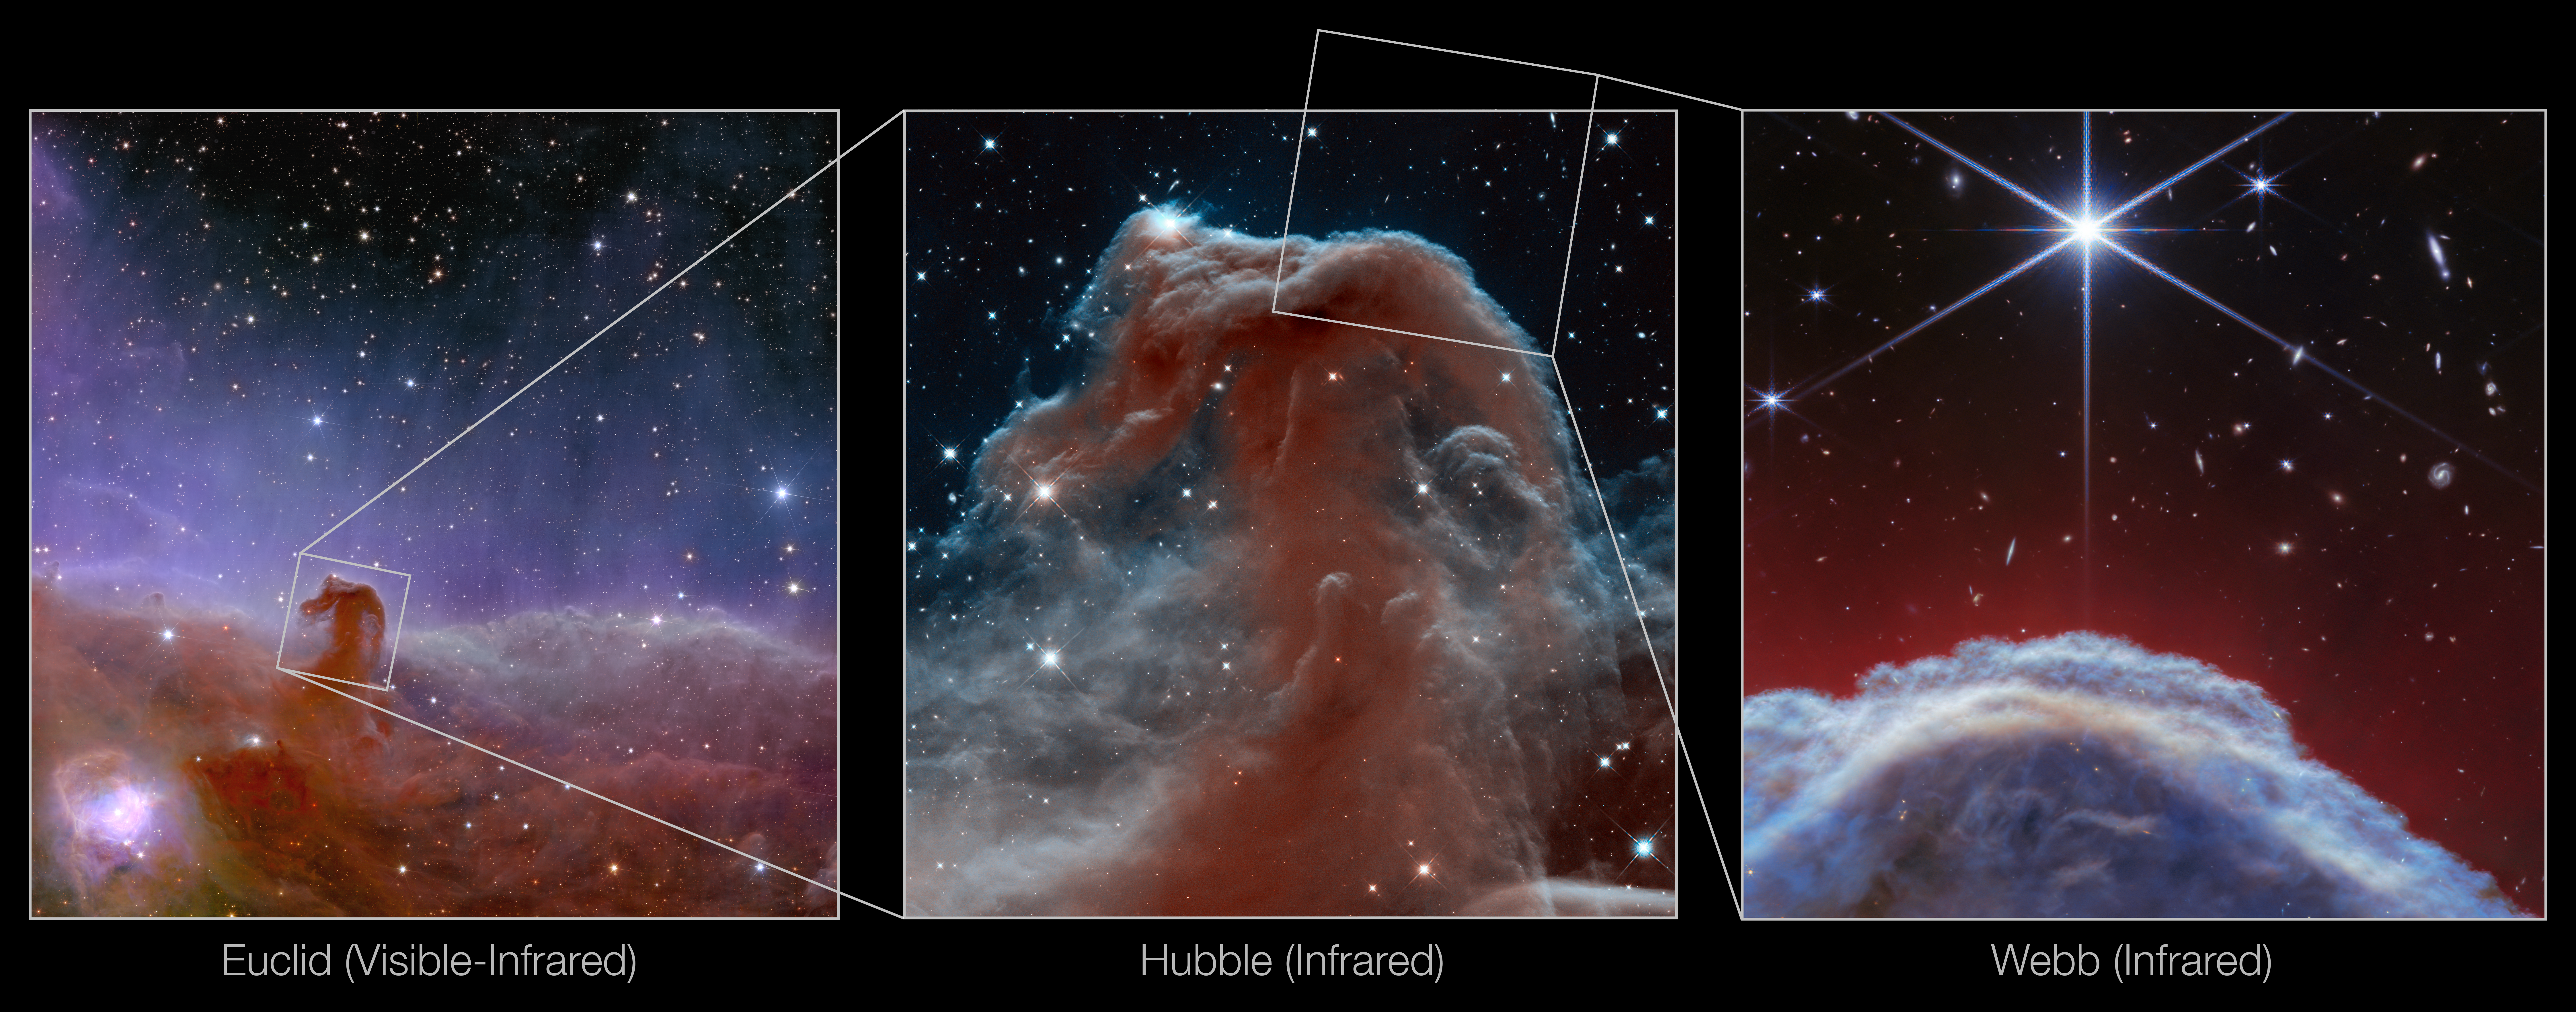

Horsehead Nebula (Euclid, Hubble and Webb images)

This image showcases three views of one of the most distinctive objects in our skies, the Horsehead Nebula. This object resides in part of the sky in the constellation Orion (The Hunter), in the western side of the Orion B molecular cloud. Rising from turbulent waves of dust and gas is the Horsehead Nebula, otherwise known as Barnard 33, which resides roughly 1300 light-years away.

The first image (left), released in November 2023, features the Horsehead Nebula as seen by ESA’s Euclid telescope. Euclid captured this image of the Horsehead in about one hour, which showcases the mission's ability to very quickly image an unprecedented area of the sky in high detail. You can learn more about this image here.

The second image (middle) shows the NASA/ESA Hubble Space Telescope’s infrared view of the Horsehead Nebula, which was featured as the telescope’s 23rd anniversary image in 2013. This image captures plumes of gas in the infrared and reveals a beautiful, delicate structure that is normally obscured by dust. You can learn more about this image here.

The third image (right) features a new view of the Horsehead Nebula from the NASA/ESA/CSA James Webb Space Telescope’s NIRCam (Near-InfraRed Camera) instrument. It is the sharpest infrared image of the object to date, showing a part of the iconic nebula in a whole new light, and capturing its complexity with unprecedented spatial resolution. You can learn more about this image here.

Credit: ESA/Euclid/Euclid Consortium/NASA, image processing by J.-C. Cuillandre (CEA Paris-Saclay), G. Anselmi, NASA, ESA, and the Hubble Heritage Team (AURA/STScI), ESA/Webb, CSA, K. Misselt (University of Arizona) and A. Abergel (IAS/University Paris-Saclay, CNRS), M. Zamani (ESA/Webb)